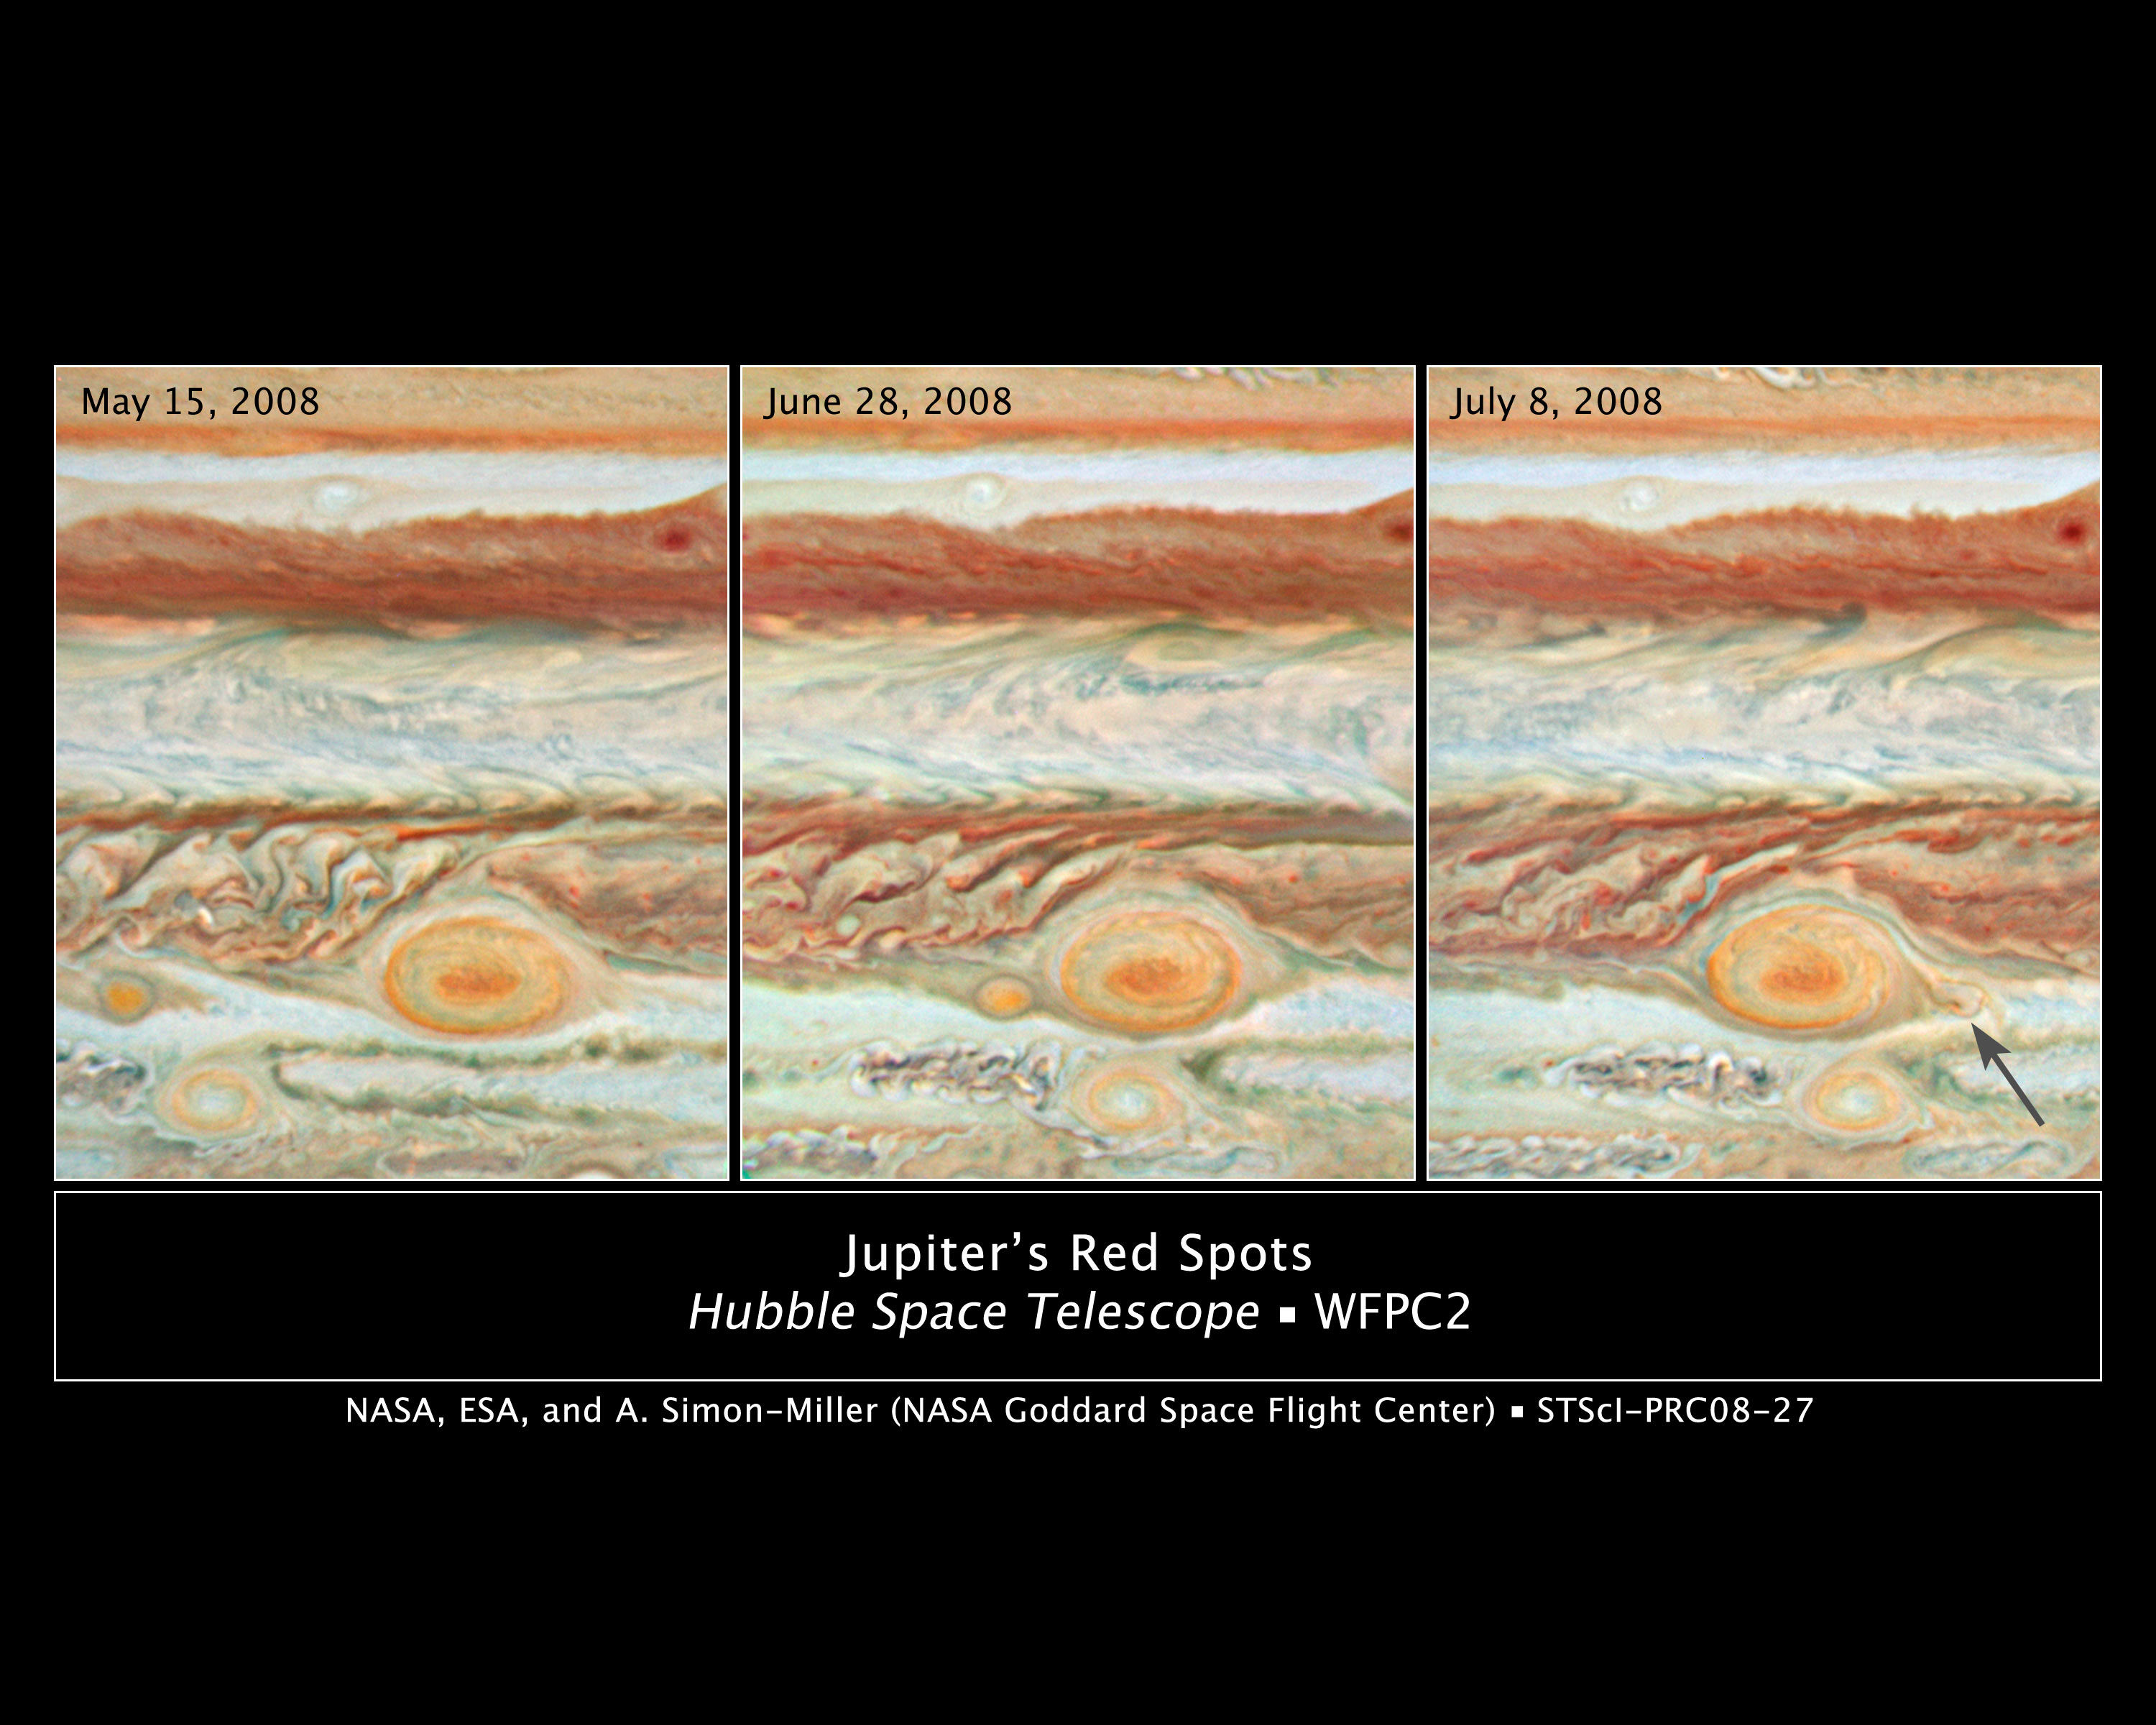

Three Red Spots Mix It Up on Jupiter

This sequence of Hubble Space Telescope images offers an unprecedented view of a planetary game of Pac-Man among three red spots clustered together in Jupiter's atmosphere.

The time series shows the passage of the "Red Spot Jr." in a band of clouds below (south) of the Great Red Spot (GRS). "Red Spot Jr." first appeared on Jupiter in early 2006 when a previously white storm turned red. This is the second time, since turning red, it has skirted past its big brother apparently unscathed.

But this is not the fate of "baby red spot," which is in the same latitudinal band as the GRS. This new red spot first appeared earlier this year. The baby red spot gets ever closer to the GRS in this picture sequence until it is caught up in the anticyclonic spin of the GRS. In the final image the baby spot is deformed and pale in colour and has been spun to the right (east) of the GRS. (Amateur astronomers' observations confirm that this is the baby spot that migrated around the GRS.) The prediction is that the baby spot will now get pulled back into the GRS "Cuisinart" and disappear for good. This is one possible mechanism that has powered and sustained the GRS for at least 150 years.

These three natural-colour Jupiter images were made from data acquired on May 15, June 28, and July 8, 2008, by the Wide Field Planetary Camera 2 (WFPC2). Each one covers 58 degrees of Jovian latitude and 70 degrees of longitude (centred on 5 degrees South latitude and 110, 121, and 121 degrees West longitude, respectively).

Credit: NASA, ESA, A. Simon-Miller (Goddard Space Flight Center), N. Chanover (New Mexico State University), and G. Orton (Jet Propulsion Laboratory)